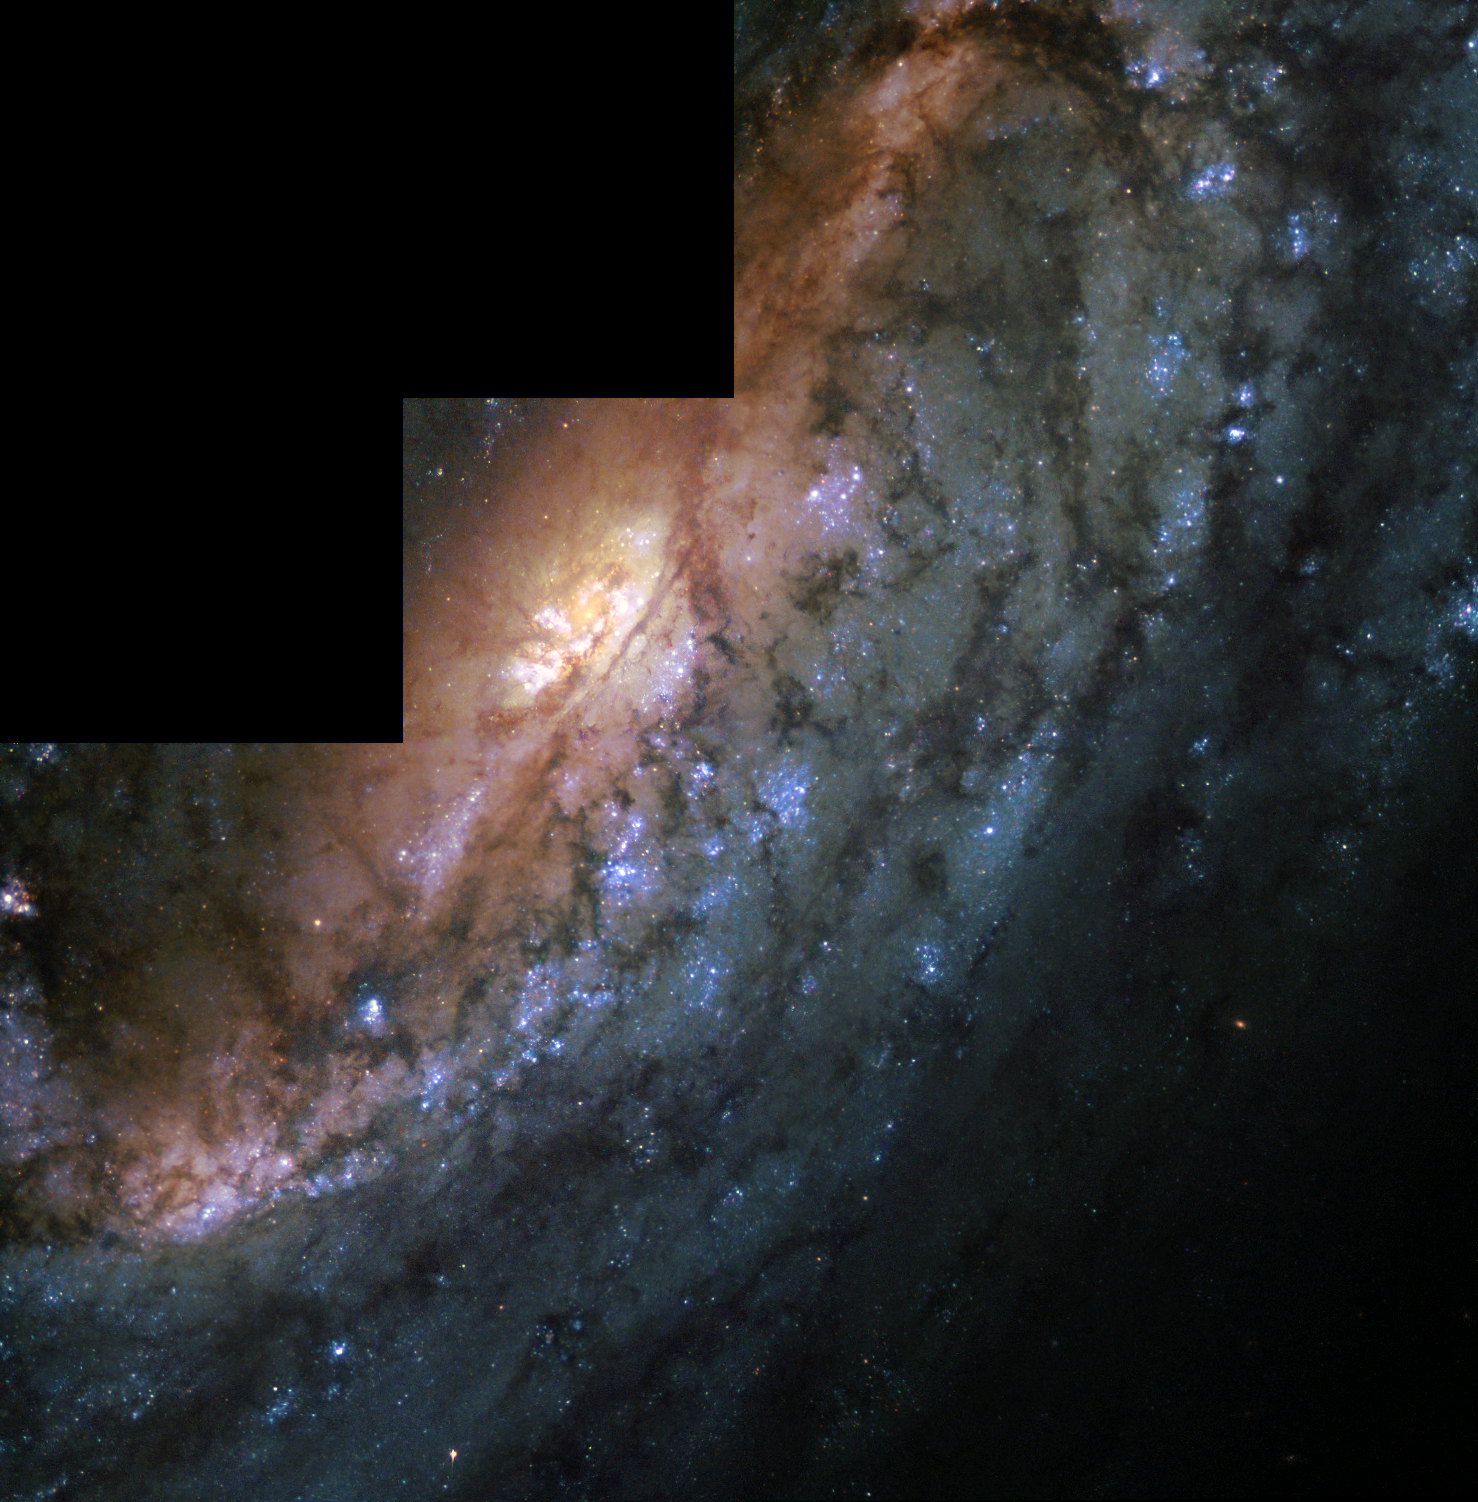

Bar in spiral galaxy NGC 2903 (WFPC2)

This colourful image, obtained by the Wide Field and Planetary Camera 2 (WFPC2) onboard the NASA/ESA Hubble Space Telescope, shows a close-up of the barred spiral galaxy NGC 2903. The galaxy bears a close resemblance to our Milky Way, which is also believed to be a barred spiral galaxy. Huge dust lanes appearing dark in the image and lots of young stars gathered in hot blue clusters, are sprinkled all over the spiral arms. Barred spirals are excellent laboratories with which to study the processes that trigger star formation. An international group of astronomers has used Hubble to study how the galaxy’s bar (seen as the reddish glow running diagonally through the image) feeds material to form new stars near the centre. The newly born stars show up partly in a so-called circumnuclear ring around the bright yellowish core of the galaxy and partly as bright star clusters (white knots in the circumnuclear ring). The image was combined from three separate exposures in visible light lasting 820 seconds. The red part of the image was exposed through a 820 nm filter, the green through a 520 nm filter and the blue through a 331 nm filter. Acknowledgements: The data that went into this Hubble image were originally obtained by: John Trauger (Jet Propulsion Laboratory), John Hoessel (University of Wisconsin – Madison), Richard Griffiths (Carnegie Mellon University), Dave Crisp (Jet Propulsion Laboratory), John Clarke (University of Michigan), Christopher Burrows (Space Telescope Science Institute), J. Westphal (California Institute of Technology), Jeff Hester (Arizona State University), Jeremy Mould (National Optical Astronomy Observatories, AURA) and Jon Holtzman (New Mexico State University).

Credit: ESA & NASA